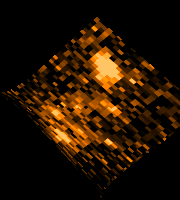

Gravitationally lensed image of highest redshift galaxy

A theoretical model of the cluster lens is used to 'unsmear' the gravitationally-lensed image back into the galaxy's normal appearance. The corrected image gives a highly magnified view of the distant galaxy with detail 5-10 times smaller than Hubble alone can provide. It clearly shows several bright, very compact regions of intense star formation.

These starburst regions are as 700 light-years across. The knots are so bright they indicate bursts of star formation taking place at a much faster rate than seen in most galaxies at the present time.

Credit: Marijn Franx (University of Groningen, The Netherlands), Garth Illingworth (University of California, Santa Cruz), and NASA/ESA